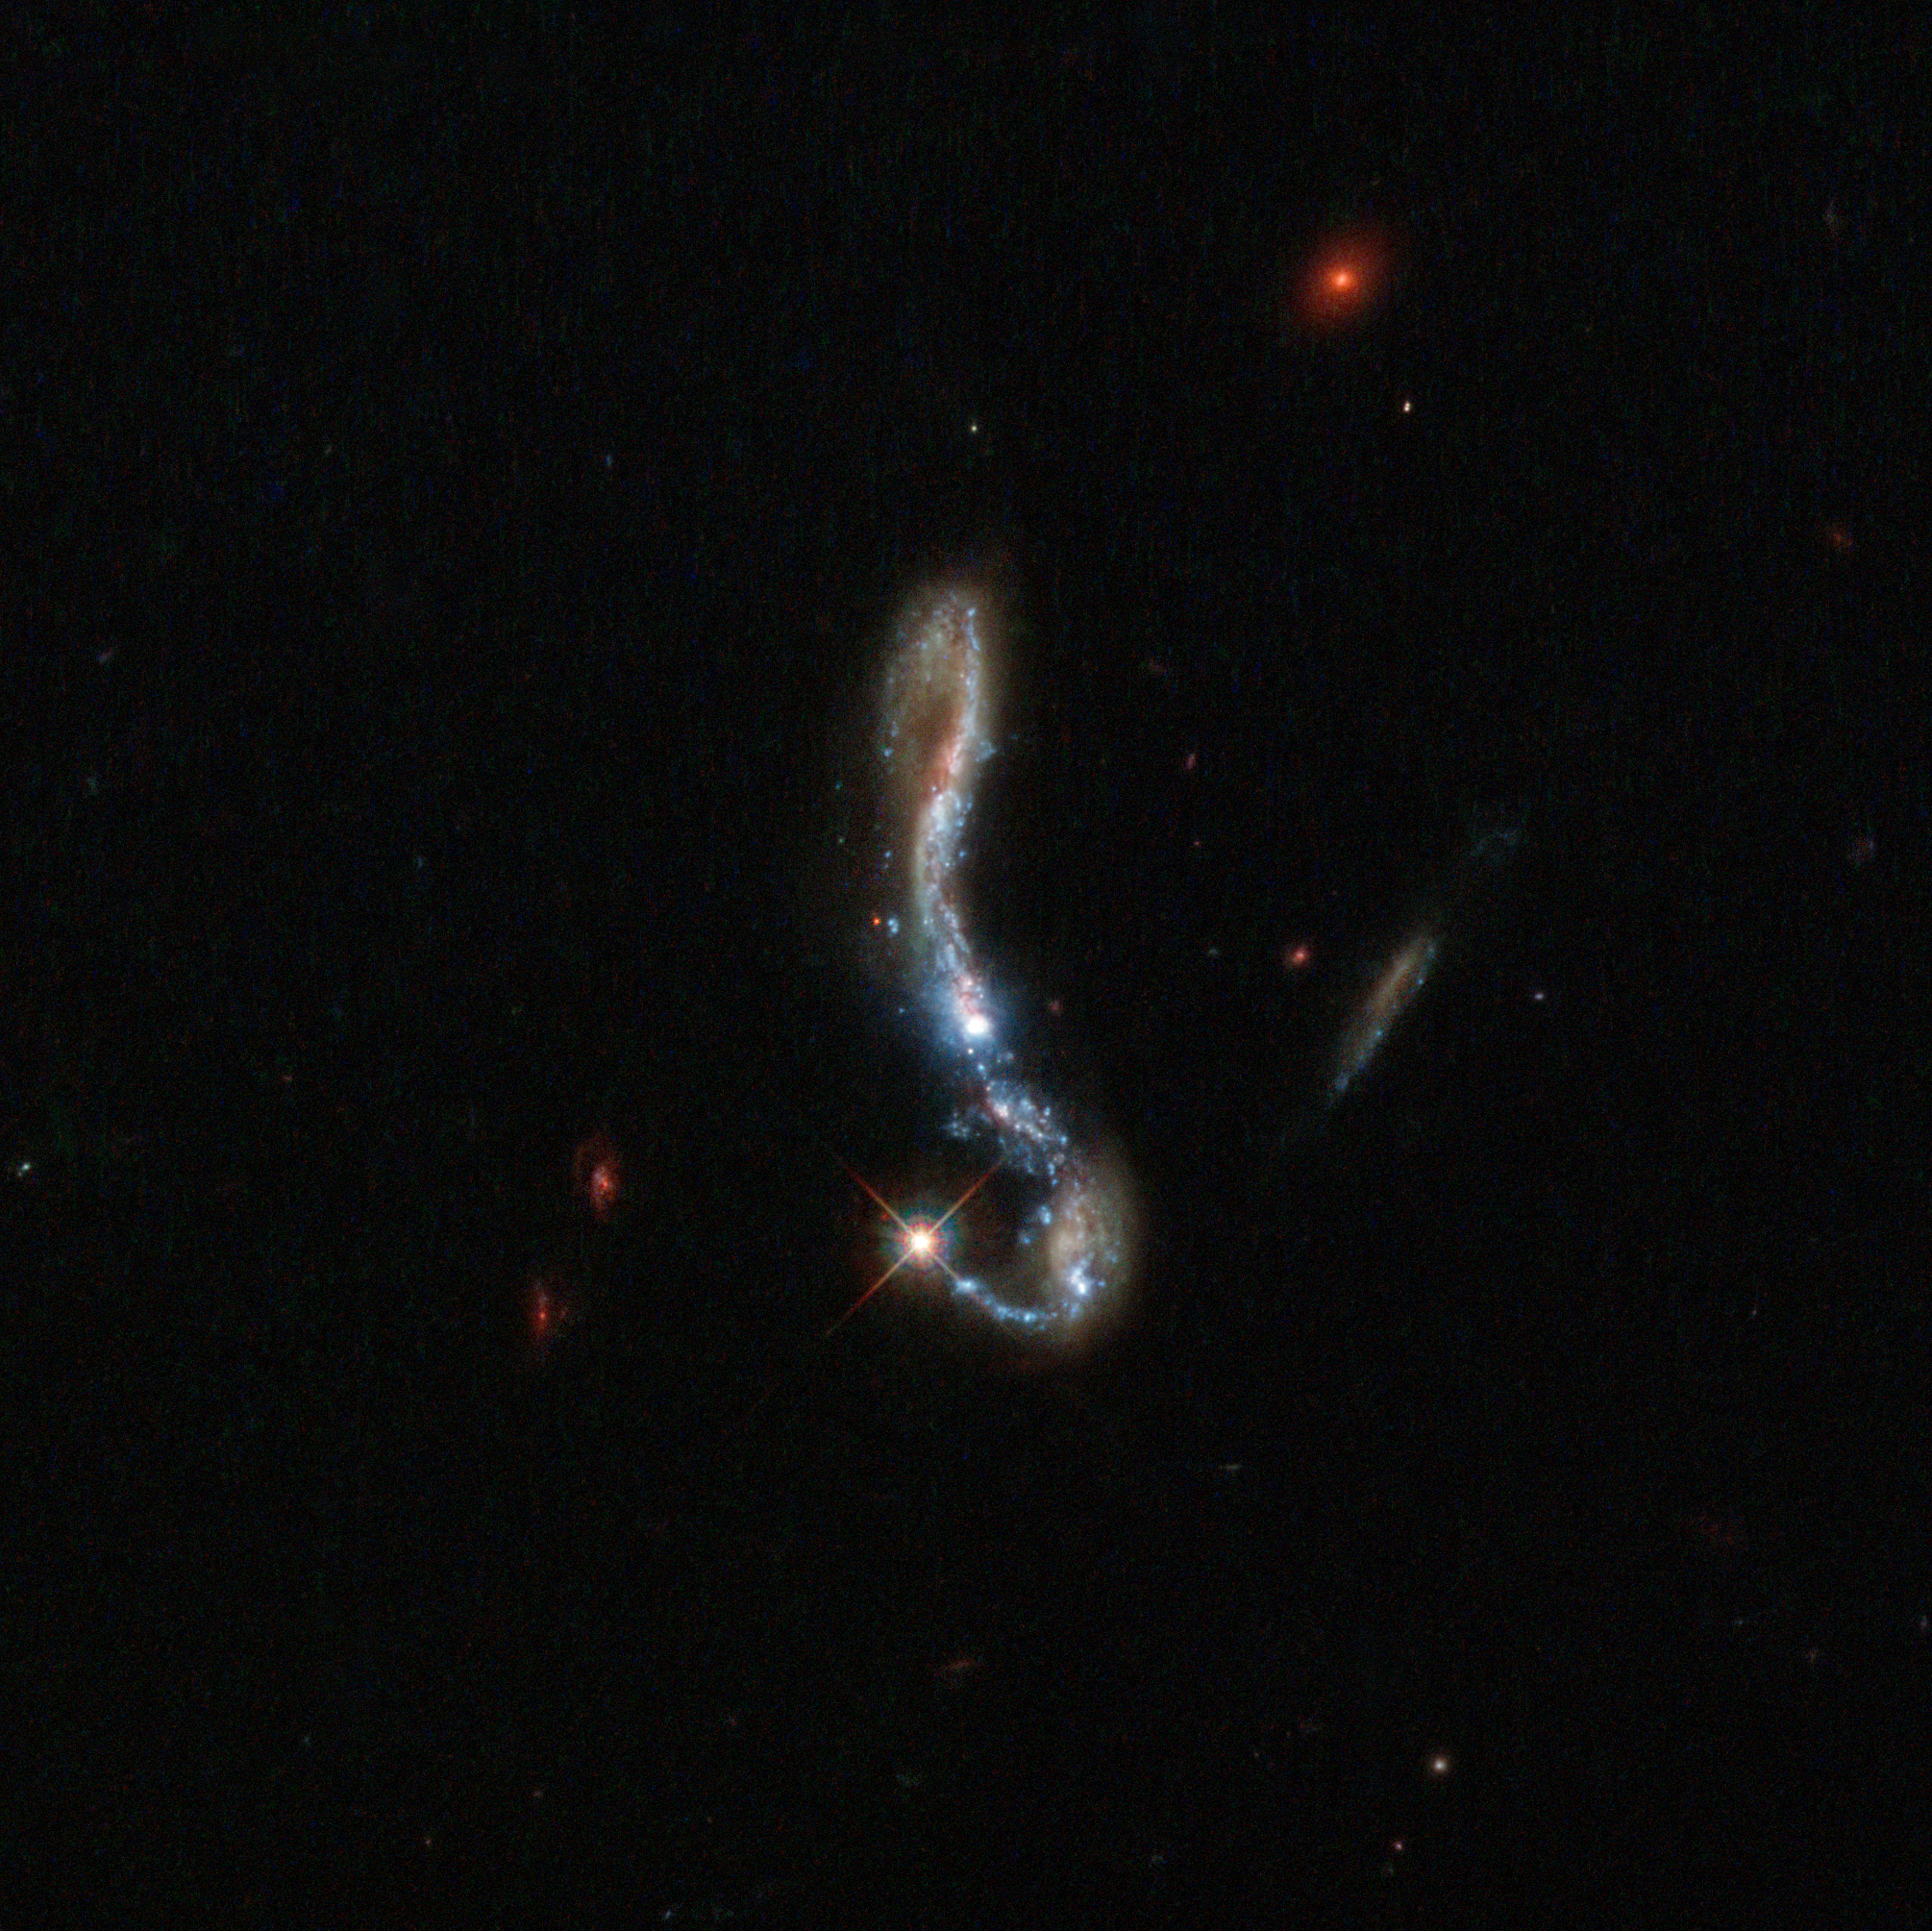

Light and dust in a nearby starburst galaxy

Visible as a small, sparkling hook in the dark sky, this beautiful object is known as J082354.96+280621.6, or J082354.96 for short. It is a starburst galaxy, so named because of the incredibly (and unusually) high rate of star formation occurring within it.

One way in which astronomers probe the nature and structure of galaxies like this is by observing the behaviour of their dust and gas components; in particular, the Lyman-alpha emission. This occurs when electrons within a hydrogen atom fall from a higher energy level to a lower one, emitting light as they do so. This emission is interesting because this light leaves its host galaxy only after extensive scattering in the nearby gas — meaning that this light can be used as a pretty direct probe of what a galaxy is made up of.

The study of this Lyman-alpha emission is common in very distant galaxies, but now a study named LARS (Lyman Alpha Reference Sample) [1] is investigating the same effect in galaxies that are closer by. Astronomers chose fourteen galaxies, including this one, and used spectroscopy and imaging to see what was happening within them. They found that these Lyman-alpha photons can travel much further if a galaxy has less dust — meaning that we can use this emission to infer how dusty the source galaxy is.

The LARS study relies heavily on the high resolving power of Hubble. When Hubble is decommissioned, no telescope will be able to make observations like this in the far ultraviolet part of the spectrum — meaning that small, glittering galaxies imaged and probed by studies like LARS may give us some of the most detailed data we have to work with for some time to come.

Credit: ESA/Hubble & NASA, M. Hayes

Credit: ESA/Hubble & NASA, M. Hayes